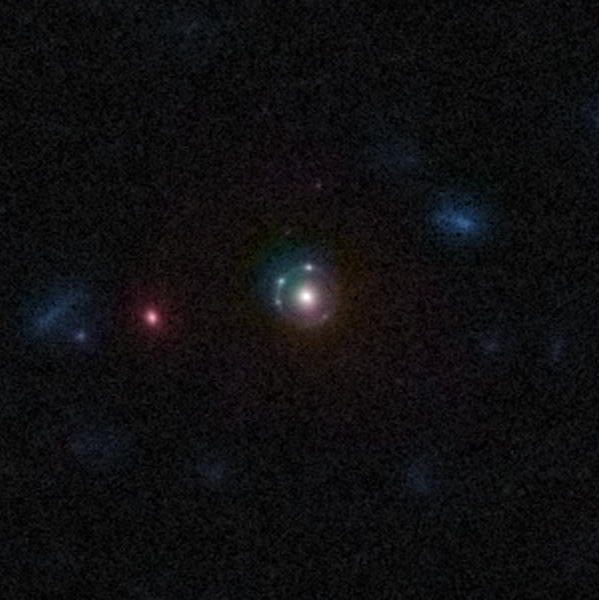

Gravitational Lens 5921+0638

An Einstein ring can be seen in this image of the gravitational lens 5921+0638 from the COSMOS survey. An Einstein ring is a complete circle image of a background galaxy, which is formed when the background galaxy, a massive, foreground galaxy, and the Hubble Space Telescope are all aligned perfectly. Here, also a quadruple lens can be seen.

This is one example of the rich diversity of 67 strong gravitational lenses found in the COSMOS survey. The lenses were discovered in a recently completed, large set of observations as part of a project to survey a single 1.6-square-degree field of sky (nine times the area of the full Moon) with several space-based and Earth-based observatories.

Gravitational lenses occur when light travelling towards us from a distant galaxy is magnified and distorted as it encounters a massive object between the galaxy and us. These gravitational lenses often allow astronomers to peer much further back into the early Universe than they would normally be able to.

This is a greyscale image taken by Hubble ACS camera and colourised with ground-based data from the CFHT (Canada-France-Hawaii Telescope).

Credit: NASA, ESA, C. Faure (Zentrum für Astronomie, University of Heidelberg) and J.P. Kneib (Laboratoire d'Astrophysique de Marseille)